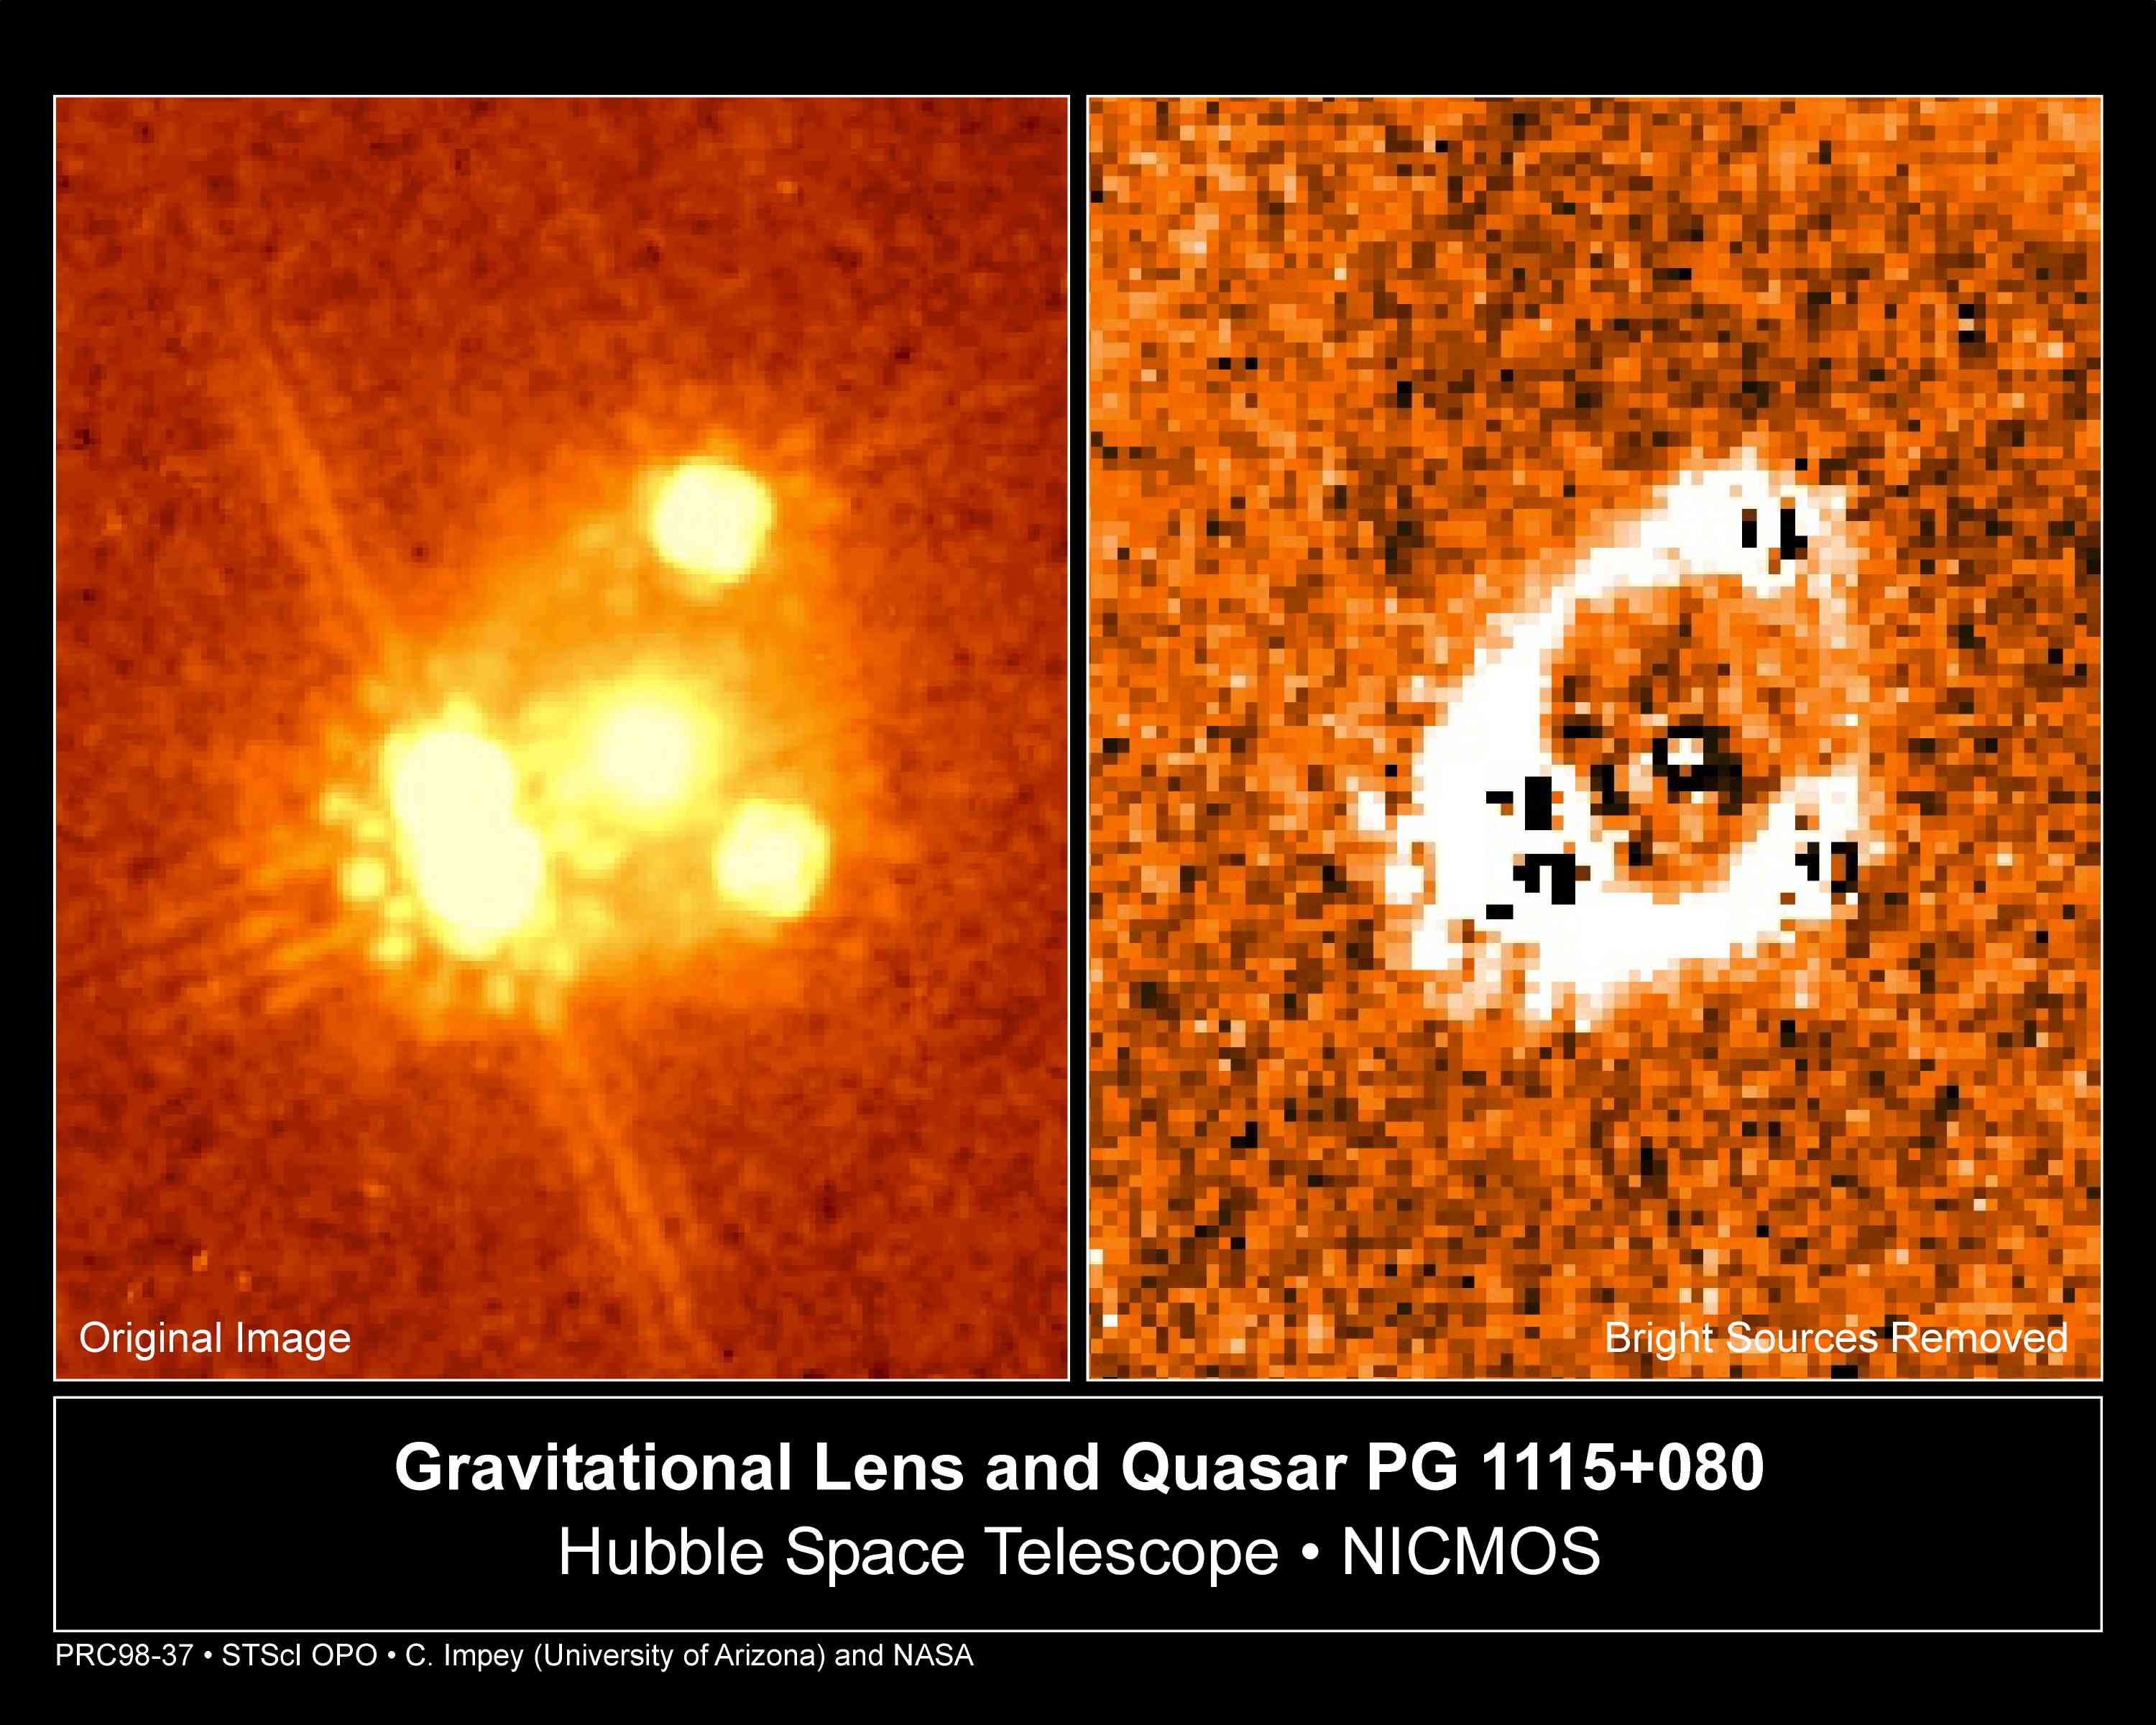

Gravitational Lens and Quasar PG 1115+080

Astronomers who are using the Hubble Space Telescope (HST) to observe the Gravitational Lensing of light from distant quasars have discovered new evidence about the rate at which the universe is expanding.

Credit: Christopher D. Impey (University of Arizona)